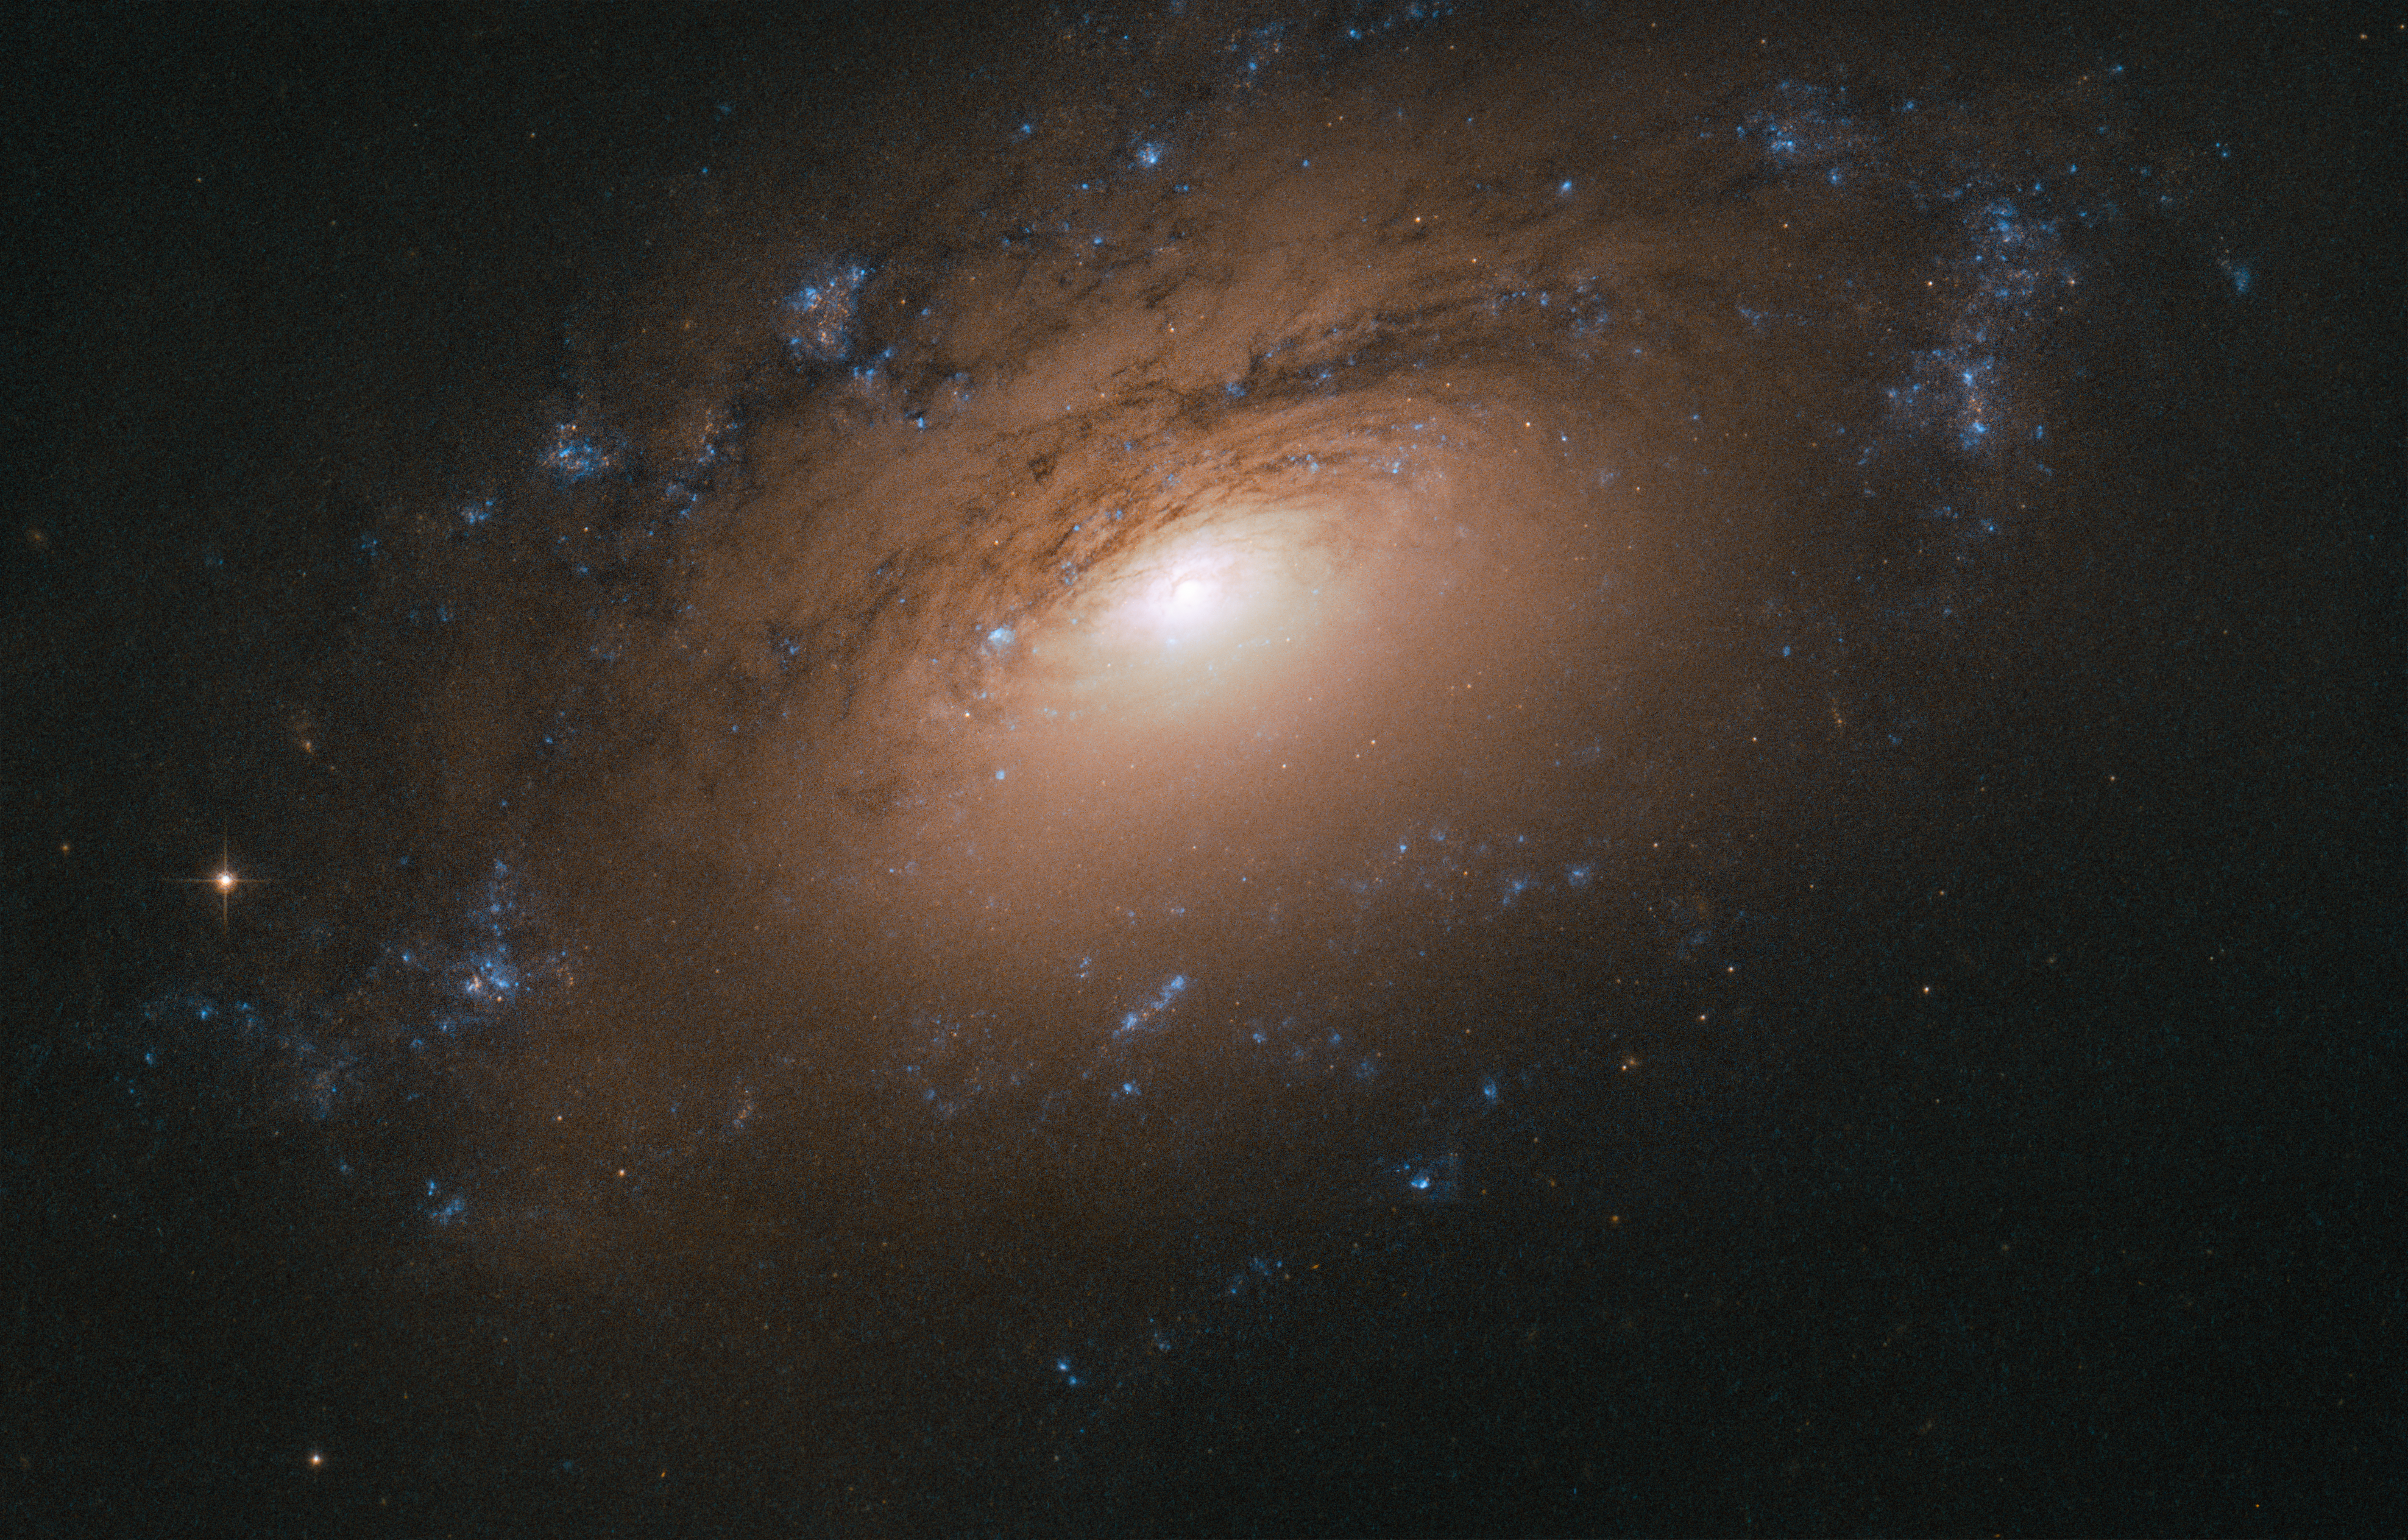

Up and Over

Every now and then, the NASA/ESA Hubble Space Telescope glimpses a common object — say, a spiral galaxy — in an interesting or unusual way. A sharply angled perspective, such as the one shown in this Picture of the Week, can make it seem as if we, the viewers, are craning our necks to see over a barrier into the galaxy's bright centre.

In the case of NGC 3169, this barrier is the thick dust embedded within the galaxy's spiral arms. Cosmic dust comprises a potpourri of particles, including water ice, hydrocarbons, silicates, and other solid material. It has many origins and sources, from the leftovers of star and planet formation to molecules modified over millions of years by interactions with starlight.

NGC 3169 is located about 70 million light-years away in the constellation of Sextans (The Sextant). It is part of the Leo I Group of galaxies, which, like the Local Group that houses our home galaxy, the Milky Way, is part of a larger galactic congregation known as the Virgo Supercluster.

Credit: ESA/Hubble & NASA, L. Ho